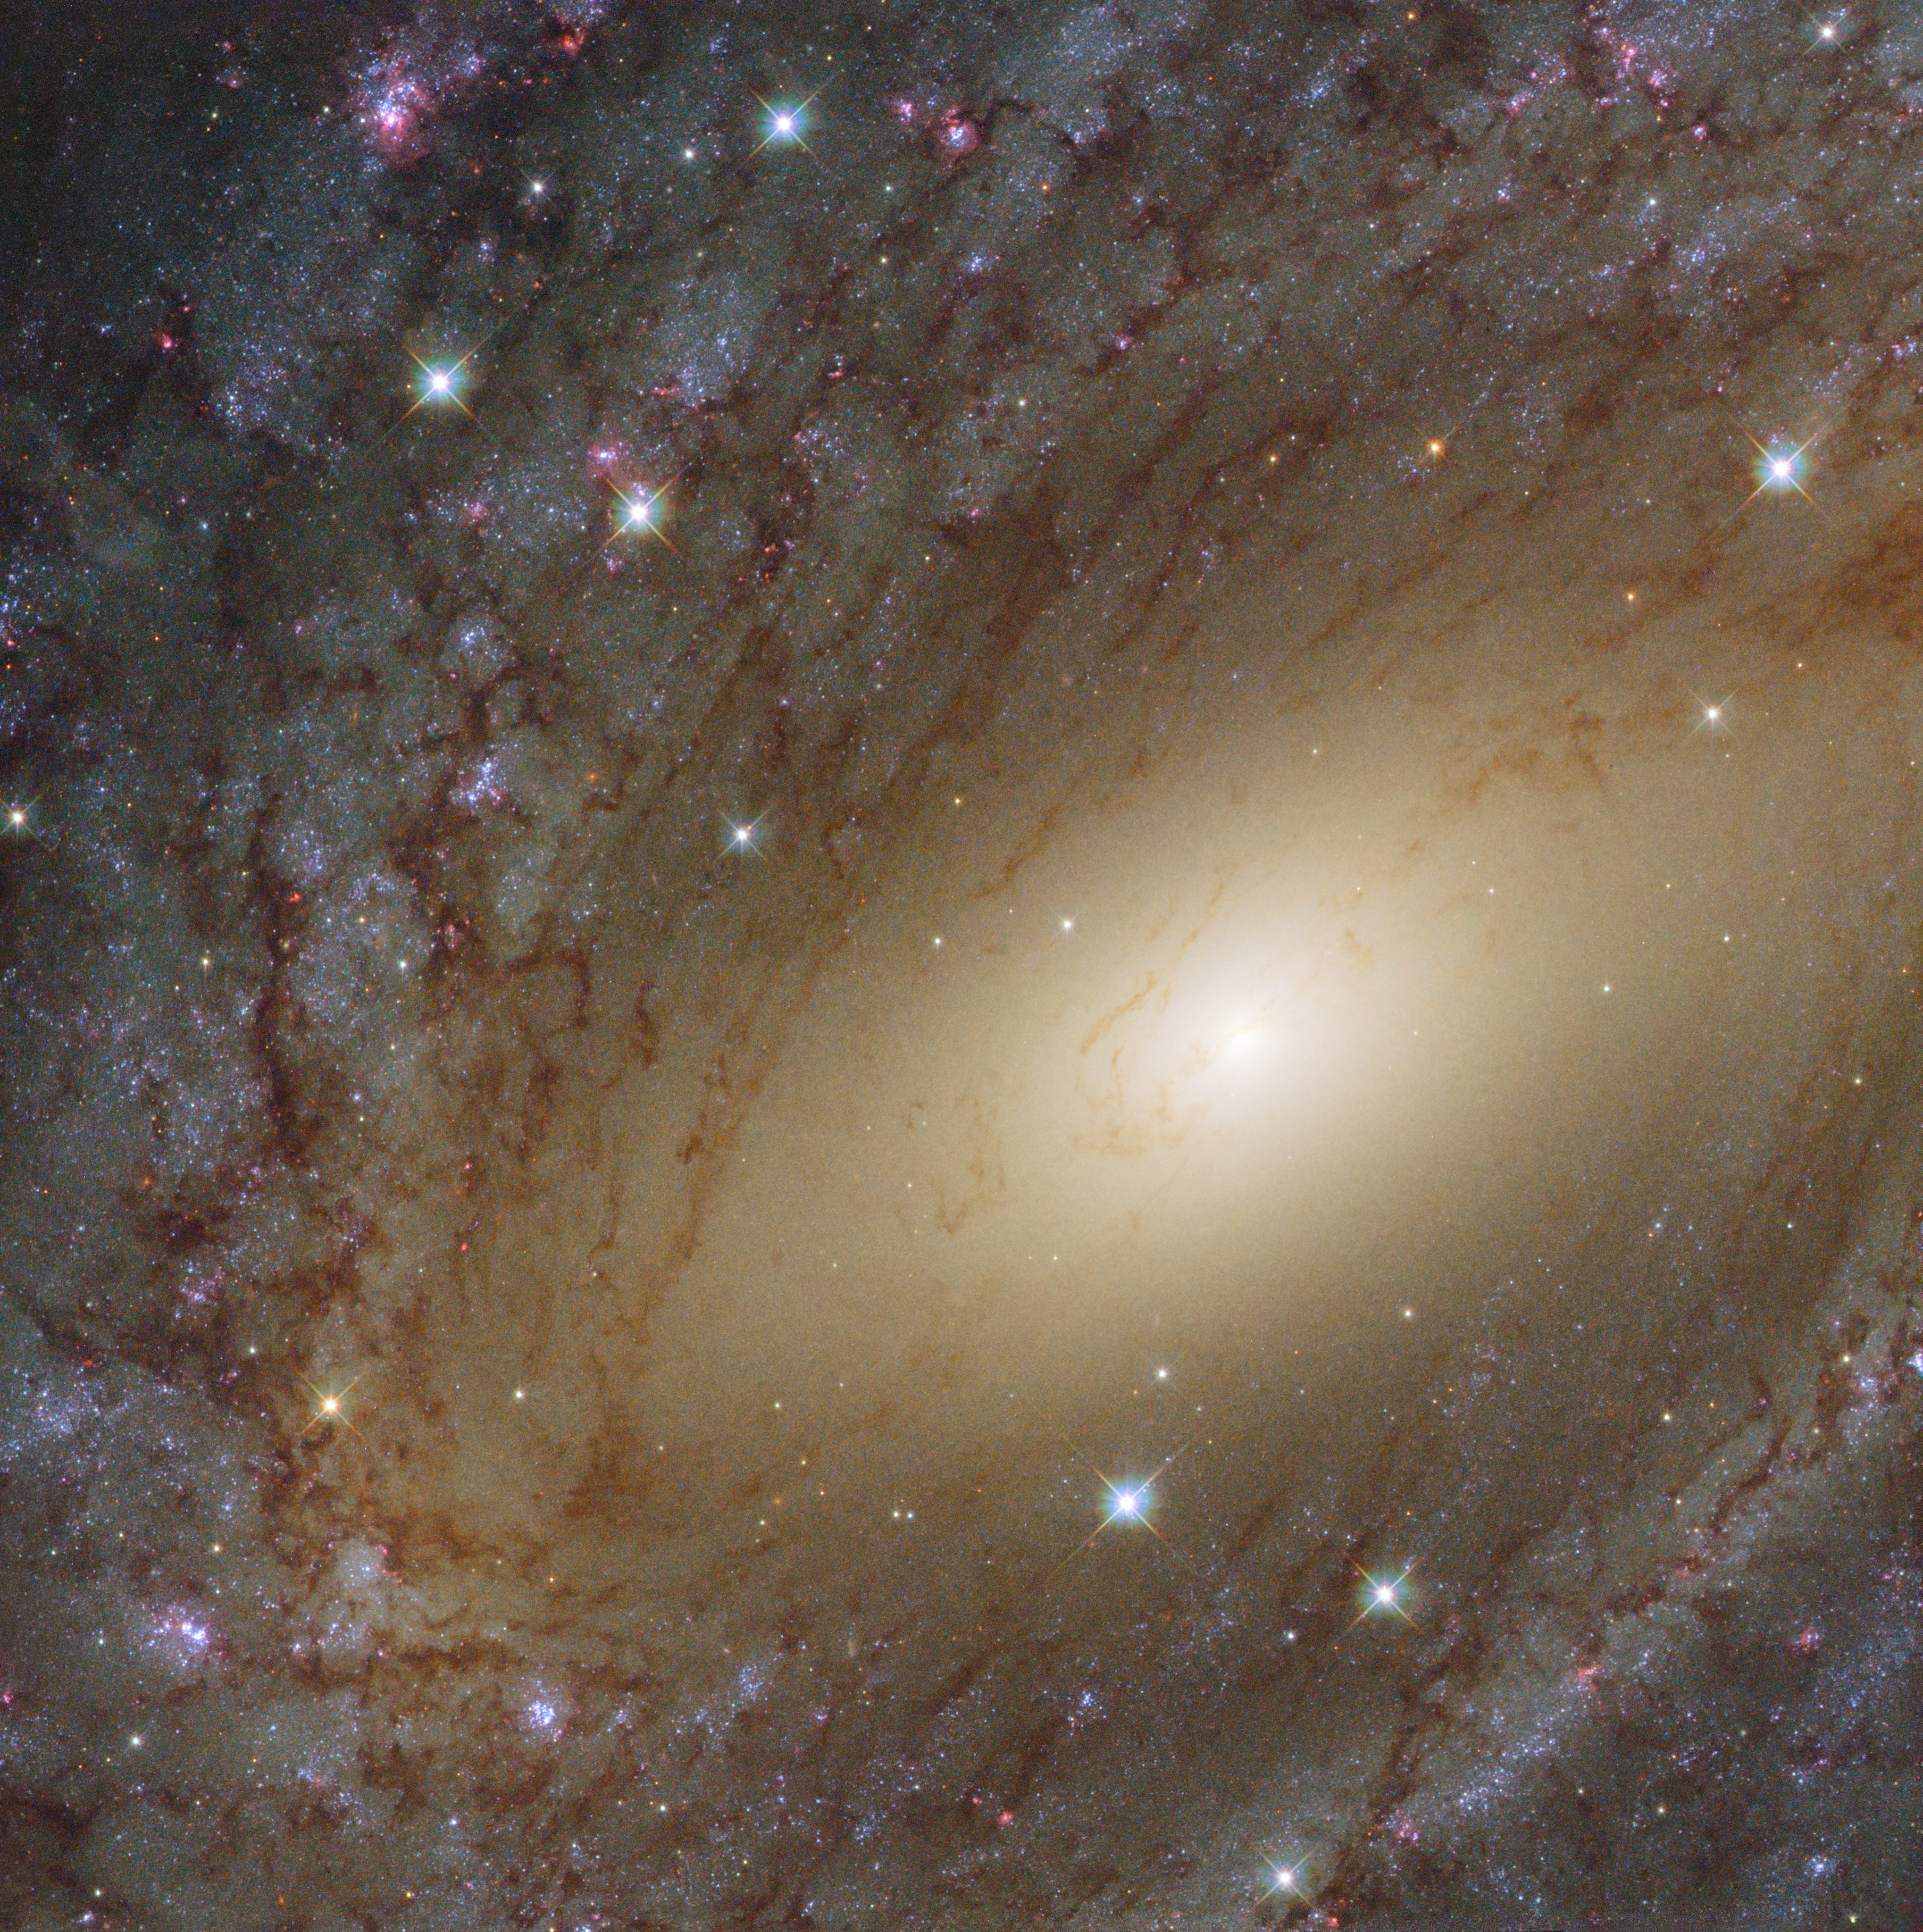

The Milky Way’s big sister

This image taken by the NASA/ESA Hubble Space Telescope’s Wide Field Camera 3 (WFC3) shows a beautiful spiral galaxy called NGC 6744. At first glance, it resembles our Milky Way albeit larger, measuring more than 200 000 light-years across compared to 100 000 light-year diameter for our home galaxy.

NGC 6744 is similar to our home galaxy in more ways than one. Like the Milky Way, NGC 6744 has a prominent central region packed with old yellow stars. Moving away from the galactic core, one can see parts of the dusty spiral arms painted in shades of pink and blue; while the blue sites are full of young star clusters, the pink ones are regions of active star formation, indicating that the galaxy is still very lively.

In 2005, a supernova, named 2005at, was discovered within NGC 6744, adding to the argument of this galaxy’s liveliness (not visible in this image). SN 2005at is a type Ic supernova, formed when a massive star collapses in itself and loses its hydrogen envelope.

Credit: ESA/Hubble & NASA Acknowledgement: Judy Schmidt